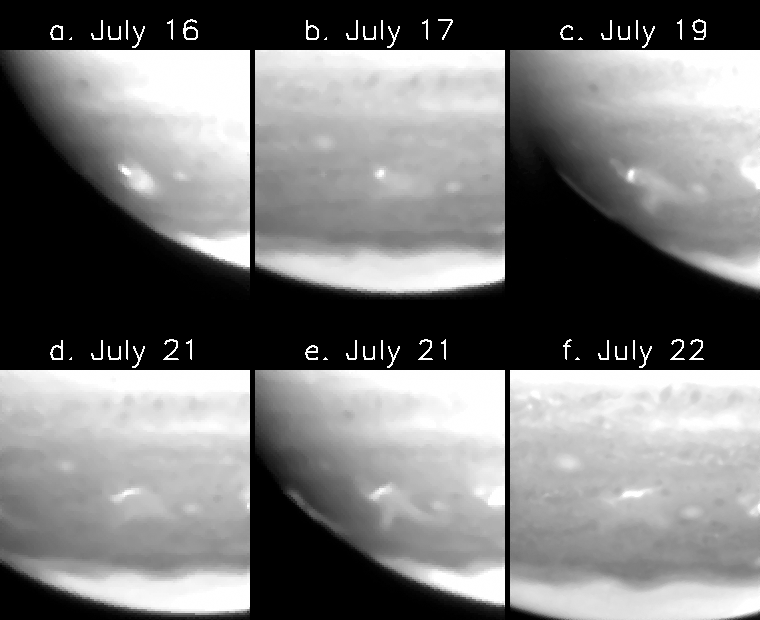

Evolution of fragment a site

This series of images, which spans more than five days beginning at 5:33 p.m. EDT on July 16, 1994, was obtained with the Hubble Space Telescope's Wide Field Planetary Camera-2 using the methane filter that reveals details in Jupiter's higher atmosphere. These images show the development of the ejecta from site A, formed by the impact of the first fragment of comet Shoemaker-Levy 9. Frames b-f were obtained 19.5, 59.6, 90.4, 109.5, and 129.5 hours later than frame a respectively. Frames a, c, and e are seen near the edge of the planet where the viewing angle enhances bright cloud structure, while frames b, d, and f are viewed more face on.

Credit: Hubble Space Telescope Comet Team, and NASA/ESA